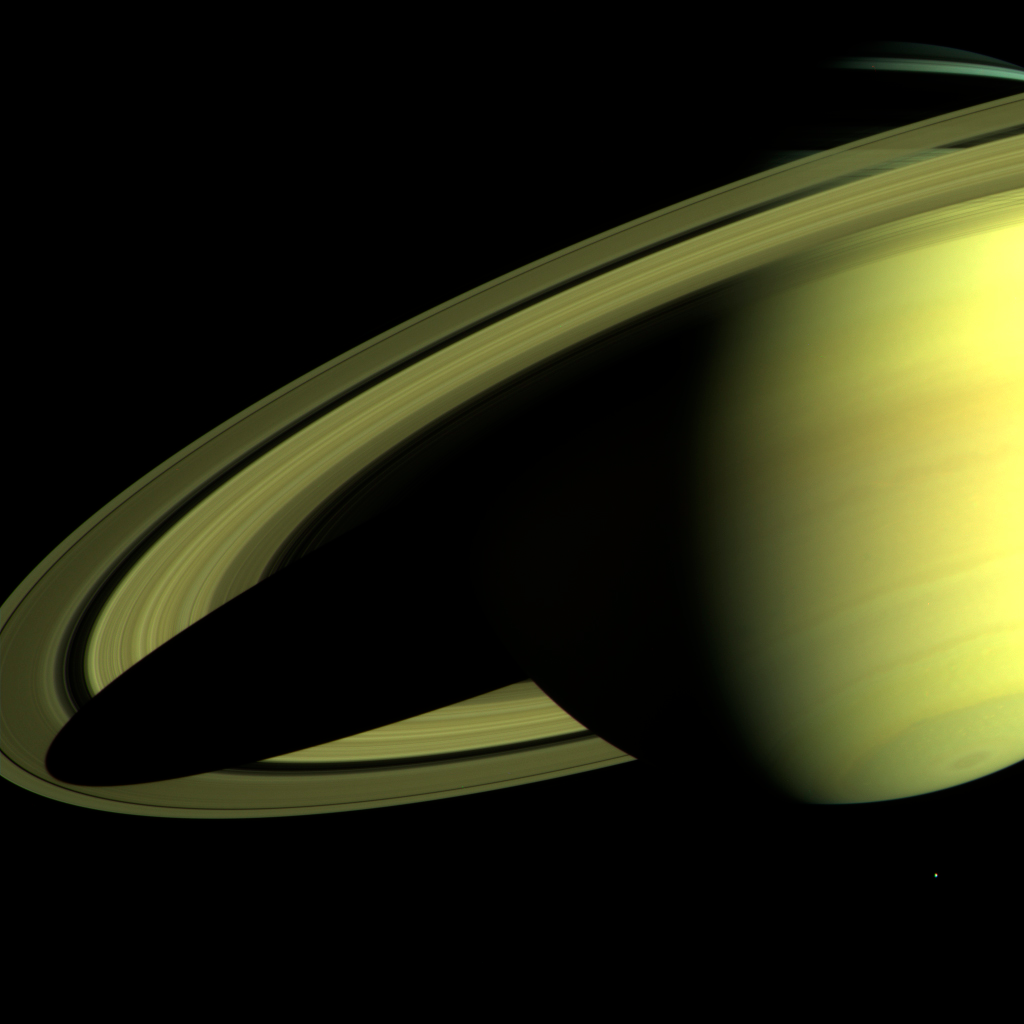

Saturn as Seen by Cassini

Saturn casting a shadow on its rings, as photographed by Cassini.

Credit: NASA/JPL